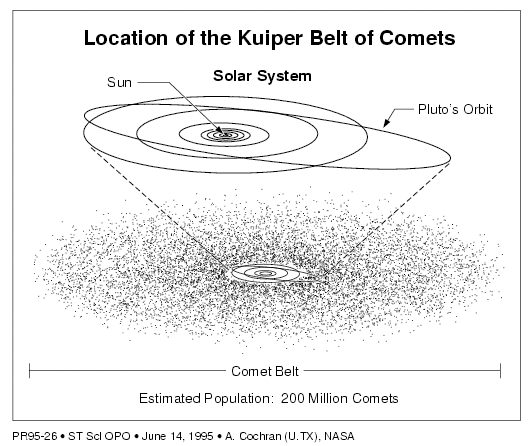

Candidate Kuiper Belt object

This is sample data from the Hubble Space Telescope that illustrates the detection of comets in the Kuiper Belt, a region of space beyond the orbit of the planet Neptune.

Credit: A. Cochran (University of Texas) and NASA/ESA